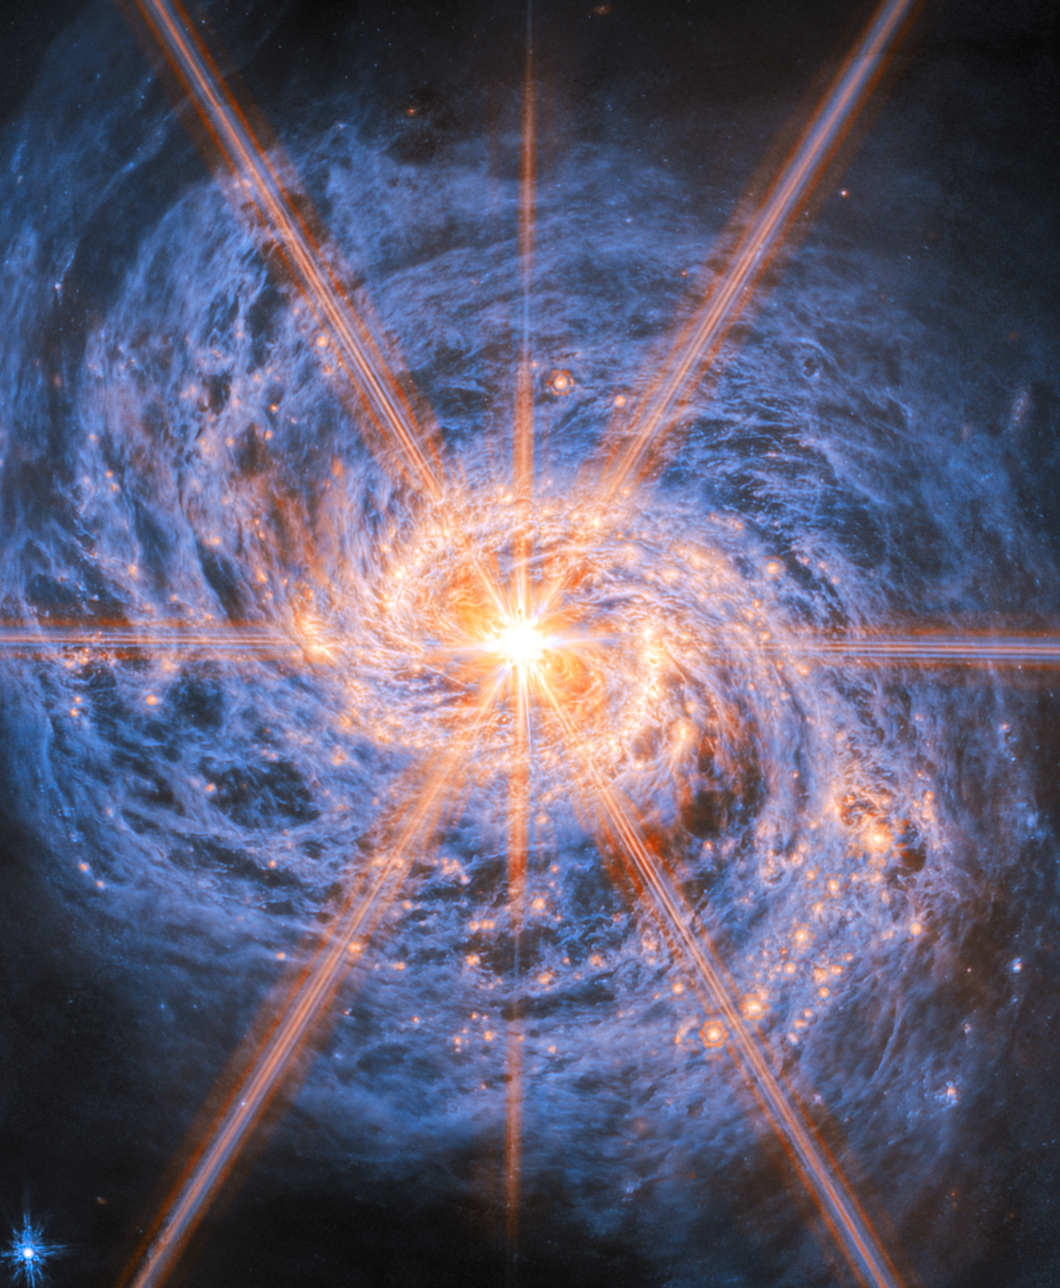

A beacon of light in swirls of dust

This latest Picture of the Month from the NASA/ESA/CSA James Webb Space Telescope features Messier 77 (M77), a barred spiral galaxy famous and appreciated among astronomers for its combination of relative proximity and spectacular features to study. It is located 45 million light-years away in the constellation Cetus (The Whale). This new image from Webb’s Mid-Infrared Instrument (MIRI) highlights its swirling spiral arms, the dust in its disc and its piercingly bright core like never before.

At the heart of M77 is a compact region filled with hot gas that handily outshines the rest of the galaxy put together, even overcoming the light-gathering capacity of Webb’s cameras. This is an active galactic nucleus (AGN), and it’s powered by M77’s central supermassive black hole, which is eight million times as massive as our Sun. Gas in the galaxy’s central regions is pulled by the strong gravity into a tight and rapid orbit around the black hole, where it crashes together and heats up, releasing tremendous amounts of radiation.

The bright orange lines appearing to radiate out from the centre of M77 are not actually a feature of the galaxy: they are a type of distortion that arises from the optical design of the telescope. Called diffraction spikes, they are created because the intense light from the unresolved AGN is bent (“diffracted”) very slightly at the edges of Webb’s hexagonal mirror panels and around one of the struts that hold up its secondary mirror. This distinctive six-plus-two-pointed pattern is the same for any image taken by Webb. For diffraction spikes to appear, the light source has to be very bright and very concentrated, so they’re most often seen on stars. But in some galaxies, as here, the nucleus is bright and compact enough to make diffraction spikes appear as well.

M77 is not just known for its easily visible AGN, but also as a prolific star-forming galaxy. The near-infrared image of M77 reveals a bar spanning across the central region, which doesn’t appear in visible-light images of the galaxy. The bar is enclosed by a bright ring, called a starburst ring, formed by the inner ends of M77’s two spiral arms. Starburst regions in galaxies are typified by extremely high star-formation rates. This ring is more than 6 000 light-years across and displays intense and widespread starbursts, visible in this image by the densely concentrated orange bubbles all around the ring. Since M77 is relatively close to Earth, this starburst ring is a very well-studied example of the phenomenon.

As an active spiral galaxy, M77’s disc is filled with gas and dust which is both a product of and fuel for future star formation. Webb’s MIRI fills out our view of the galaxy with the glow of interstellar dust grains emitted at longer wavelengths, shown here in blue. The dust forms a huge vortex of smoky, swirling filaments with cavities in between. The glowing orange bubbles carved out by newly formed star clusters are also prominently visible out along the galaxy’s arms.

Beyond Webb’s quite focused view, M77’s arms join into a faint extended ring of hydrogen gas thousands of light-years wide, where yet more star formation is taking place. Vast, tenuous filaments of hydrogen gas stretch across this ring and out into intergalactic space, forming an outermost layer around the galaxy. For the tentacle-like appearance of these filaments, M77 is also named the Squid Galaxy.

The data used to create this image are from an observing programme (#3707) that surveyed massive, nearby, star-forming galaxies to create a rich dataset useful for many scientific investigations. As can be seen here, the stunning resolution of Webb’s instruments reveals star clusters and rich reservoirs of gas, which can be used to explore the cycle of star formation, life and death in these and other galaxies.

Credit: ESA/Webb, NASA & CSA, A. Leroy